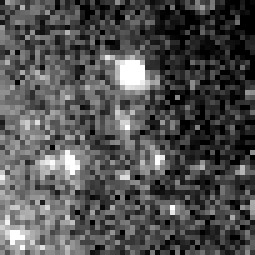

Cepheid 4 NGC 4603

Harvard Observatory astronomer Henrietta S. Leavitt makes the first crucial step in establishing the distances to nearby "spiral nebulae." Studying variable stars in the Magellanic Clouds, she discovers the presence of rhythmically pulsating stars, known as Cepheid variables, which brighten and dim over a period of days. By observing the relationship between a Cepheid's brightness and its pulsation rate, astronomers can calculate how much light it emits and then use that number to estimate its distance.

Credit: NASA & ESA